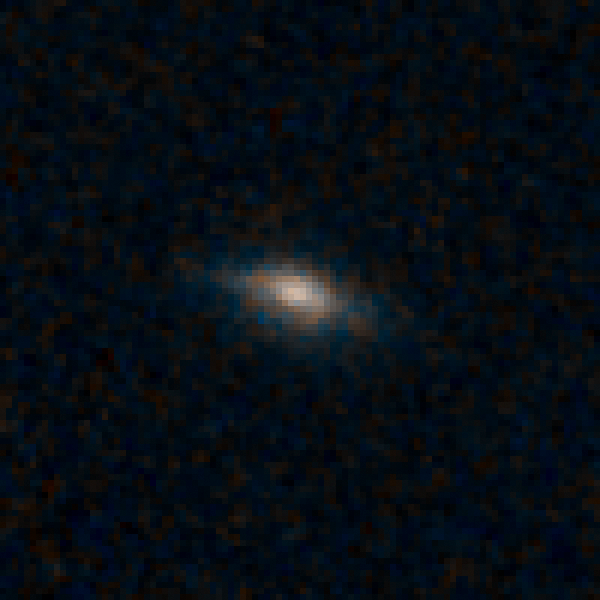

Sample galaxy 36721

Black holes in the early universe needed a few snacks rather than one giant meal to fuel their quasars and help them grow, a new study shows. Quasars are the brilliant beacons of light that are powered by black holes feasting on captured material, and in the process, heating some of the matter to millions of degrees. The brightest quasars reside in galaxies distorted by collisions with other galaxies. These encounters send lots of gas and dust into the gravitational whirlpool of hungry black holes. Now, however, astronomers are uncovering an underlying population of fainter quasars that thrive in normal-looking spiral galaxies. They are triggered by black holes snacking on such tasty treats as a batch of gas or the occasional small satellite galaxy.

Credit: NASA, ESA/Hubble, and K. Schawinski (Yale University, USA)